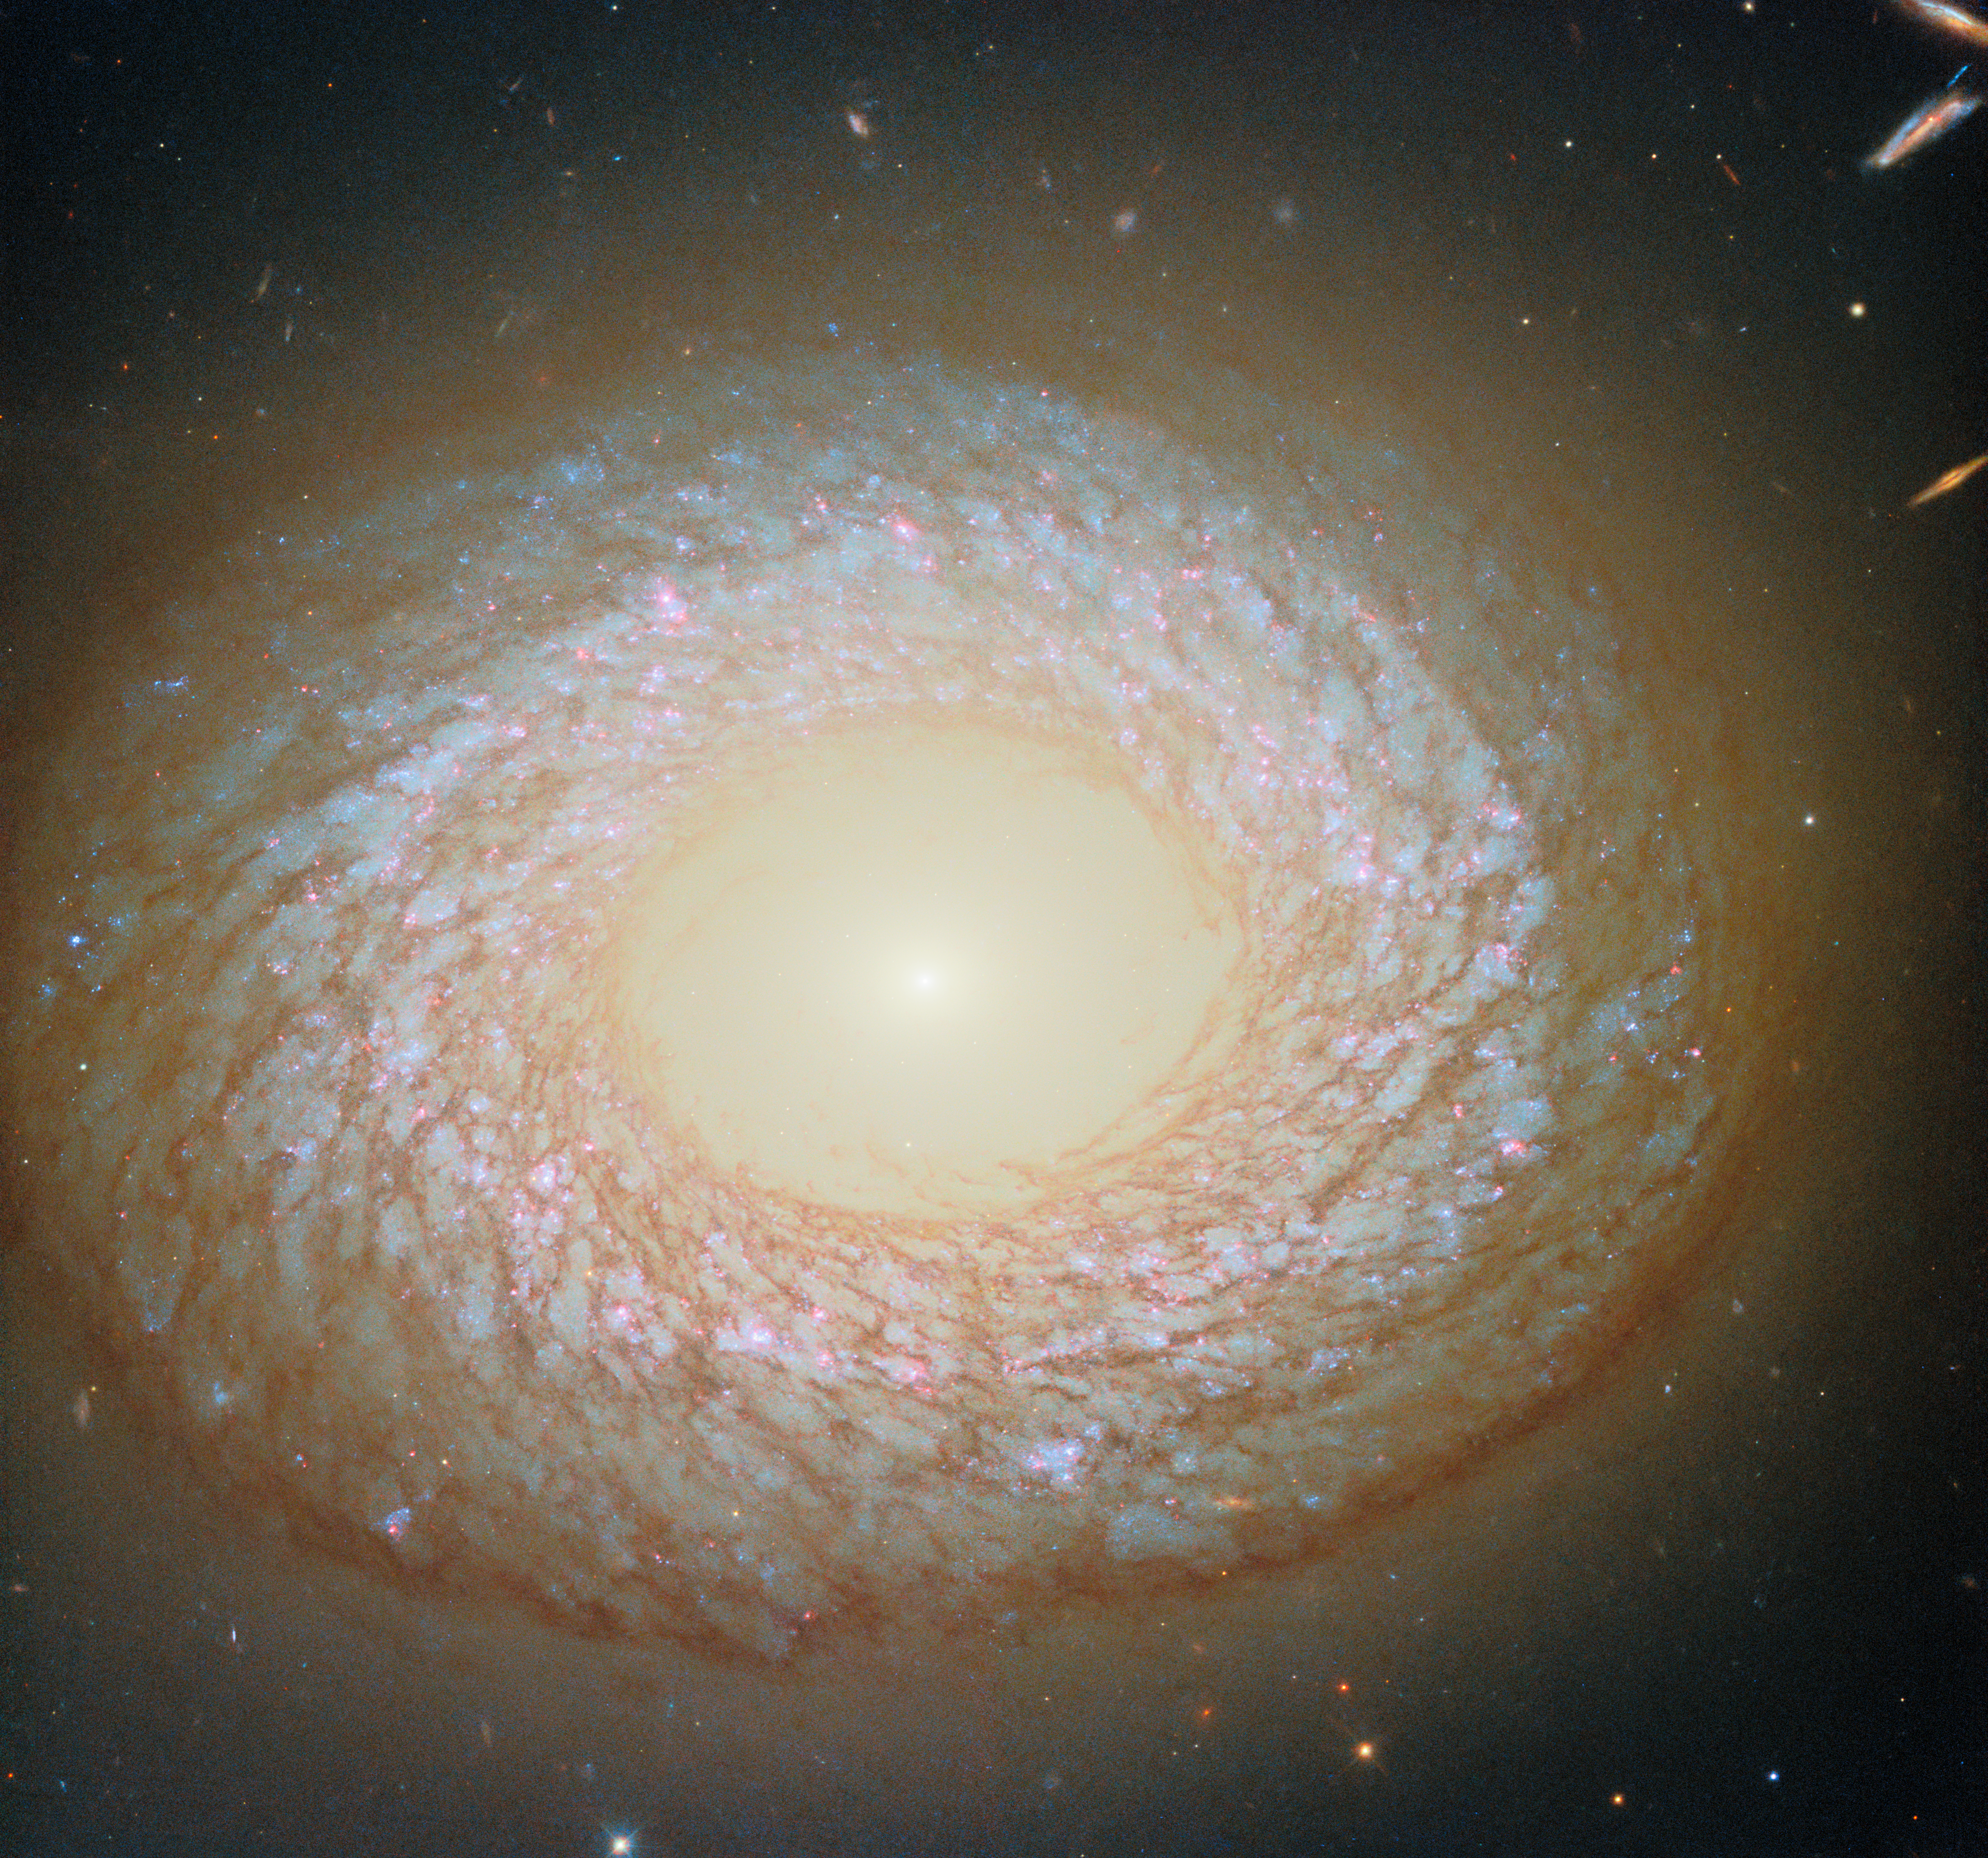

Spiral, elliptical or neither?

Today’s NASA/ESA Hubble Space Telescope Picture of the Week features a galaxy that’s hard to categorise. The galaxy in question is NGC 2775, which lies 67 million light-years away in the constellation Cancer (The Crab). NGC 2775 sports a smooth, featureless centre that is devoid of gas, resembling an elliptical galaxy. It also has a dusty ring with patchy star clusters, like a spiral galaxy. Which is it, then: spiral or elliptical — or neither?

Because we can only view NGC 2775 from one angle, it’s difficult to say for sure. Some researchers have classified NGC 2775 as a spiral galaxy because of its feathery ring of stars and dust, while others have classified it as a lenticular galaxy. Lenticular galaxies have features common to both spiral and elliptical galaxies.

It’s not yet known exactly how lenticular galaxies come to be, and they might form in a variety of ways. Lenticular galaxies might be spiral galaxies that have merged with other galaxies, or that have mostly run out of star-forming gas and lost their prominent spiral arms. They also might have started out more similar to elliptical galaxies, then collected gas into a disk around them.

Some evidence suggests that NGC 2775 has merged with other galaxies in the past. Invisible in this Hubble image, NGC 2775 has a tail of hydrogen gas that stretches almost 100 000 light-years around the galaxy. This faint tail could be the remnant of one or more galaxies that wandered too close to NGC 2775 before being stretched apart and absorbed. If NGC 2775 merged with other galaxies in the past, it could explain the galaxy’s strange appearance today.

A Hubble image of NGC 2775 was previously released in 2020. The new version adds observations of a specific wavelength of red light that is emitted by clouds of hydrogen gas surrounding massive young stars.

Credit: ESA/Hubble & NASA, F. Belfiore, J. Lee and the PHANGS-HST Team